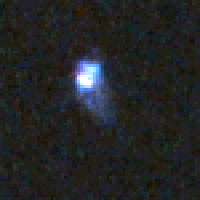

Distant Supernova 1 - Before Outburst

Supernovae are extremely luminous and cause a burst of radiation that often briefly outshines an entire galaxy, before fading from view over several weeks or months. During this short interval a supernova can radiate as much energy as the Sun is expected to emit over its entire life span.

Credit: NASA/ESA and A. Riess (STScI)